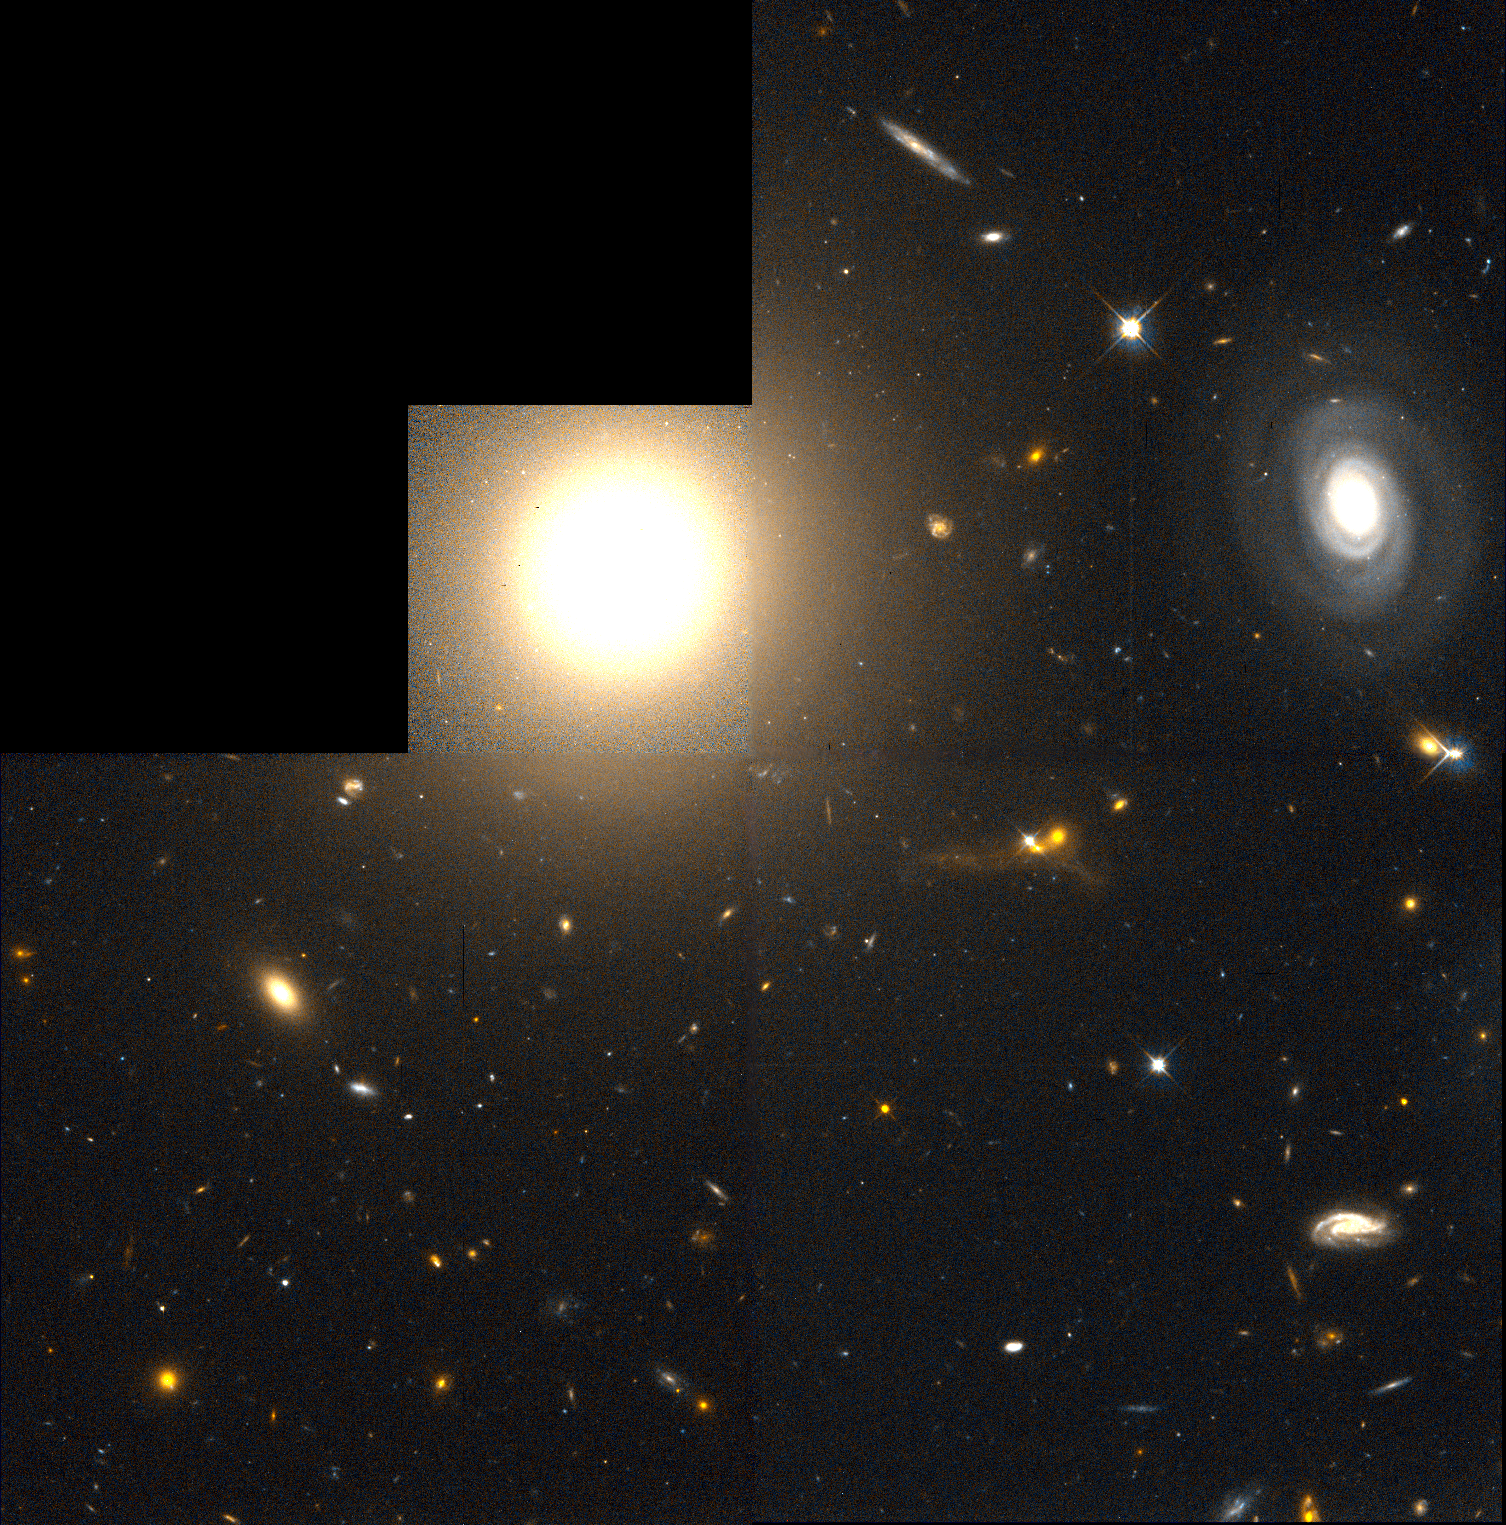

NGC 4881

This photo mosaic, which shows a field of distant galaxies, is a computer enhanced reproduction of a picture taken 4 March 1994 with the repaired Hubble Space Telescope. It combines 16 exposures of 15 minutes each, taken through two filters (F555W and F814W) with the Wide Field Planetary Camera 2. The HST WFPC2 field is chevron-shaped, because it is a mosaic of images recorded with three Wide Field cameras and one higher resolution camera (Planetary Camera) in the upper left.

Credit: Hubble Space Telescope WFPC Team, NASA/ESA, STScI